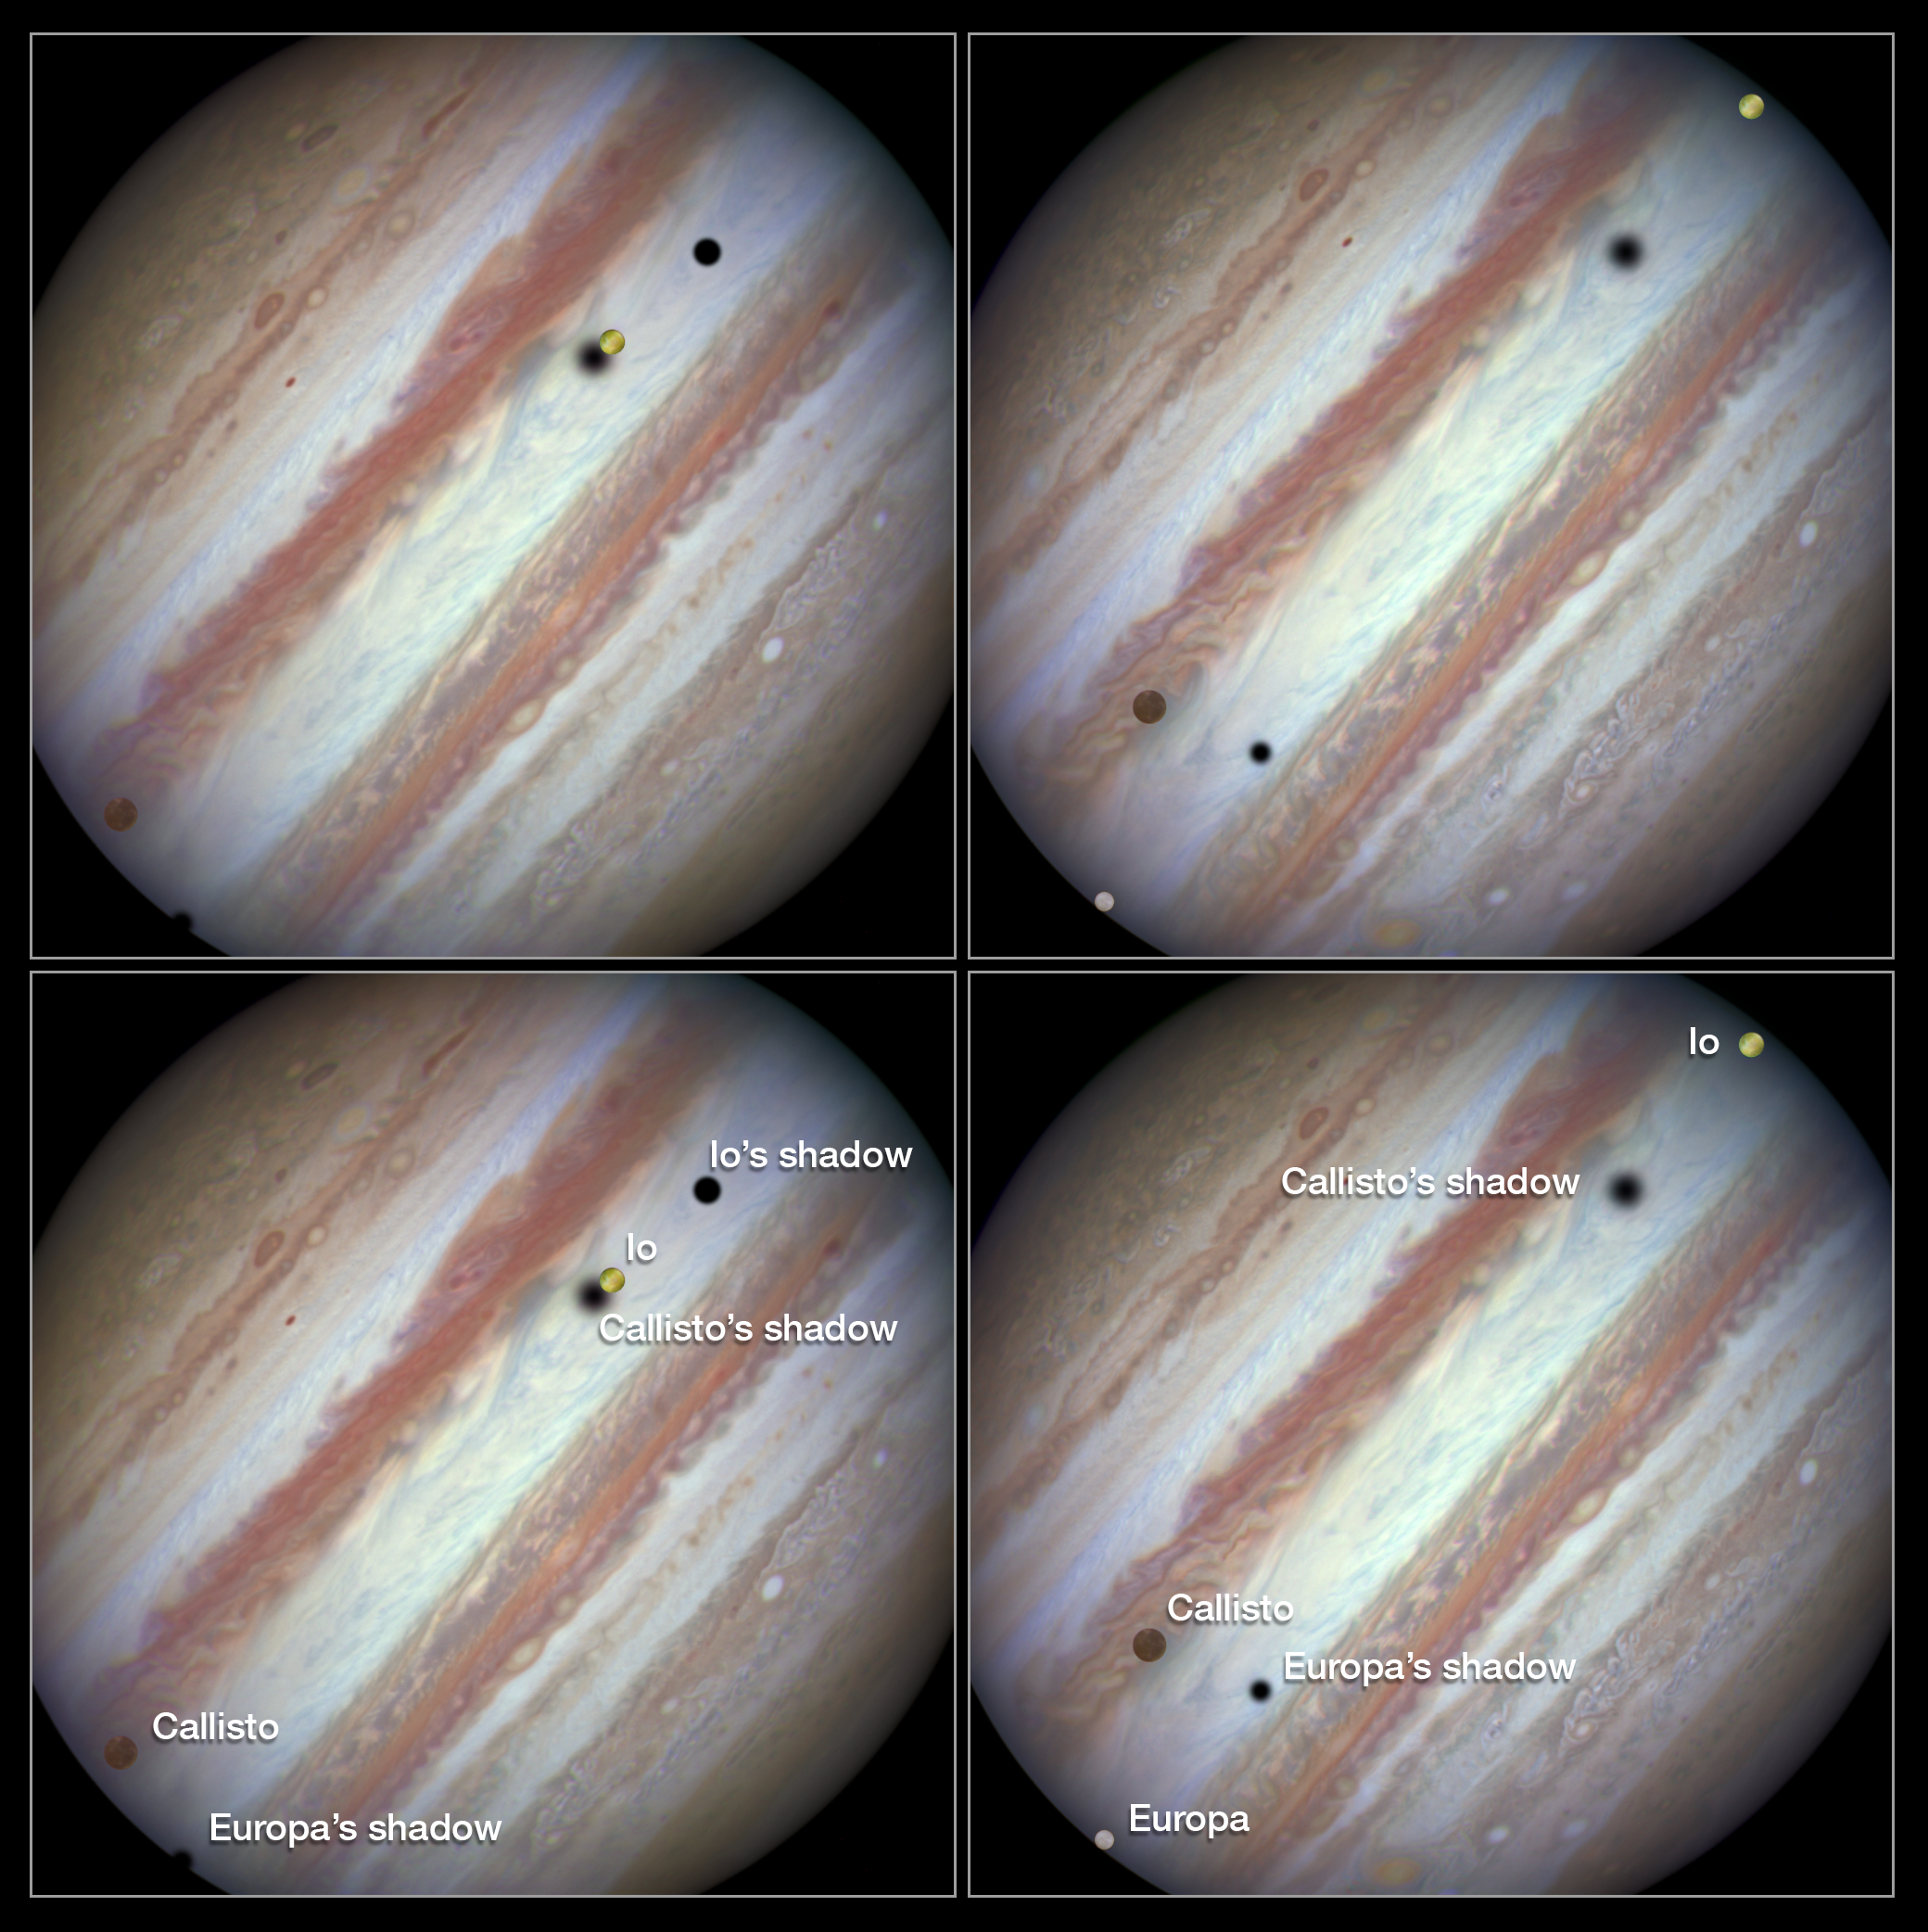

Three moons and their shadows parade across Jupiter — Comparison of beginning and end of sequence, including annotations

These new NASA/ESA Hubble Space Telescope images capture a rare occurrence as three of Jupiter’s largest moons parade across the giant gas planet’s banded face.

The image on the left shows the Hubble observation at the beginning of the event. On the left is the moon Callisto and on the right, Io. The shadows from Europa, which cannot be seen in the image, Callisto, and Io are strung out from left to right.

The image on the right shows the end of the event, approximately 42 minutes later. Europa has entered the frame at lower left with slower moving Callisto above and to the right of it. Meanwhile Io — which orbits significantly closer to Jupiter and so appears to move much more quickly — is approaching the eastern limb of the planet. Whilst Callisto’s shadow seems hardly to have moved Io’s has set over the planet’s eastern edge and Europa’s has risen further in the west.

The movement of the moons is shown in the video created from Hubble stills.

Credit: NASA, ESA, Hubble Heritage Team